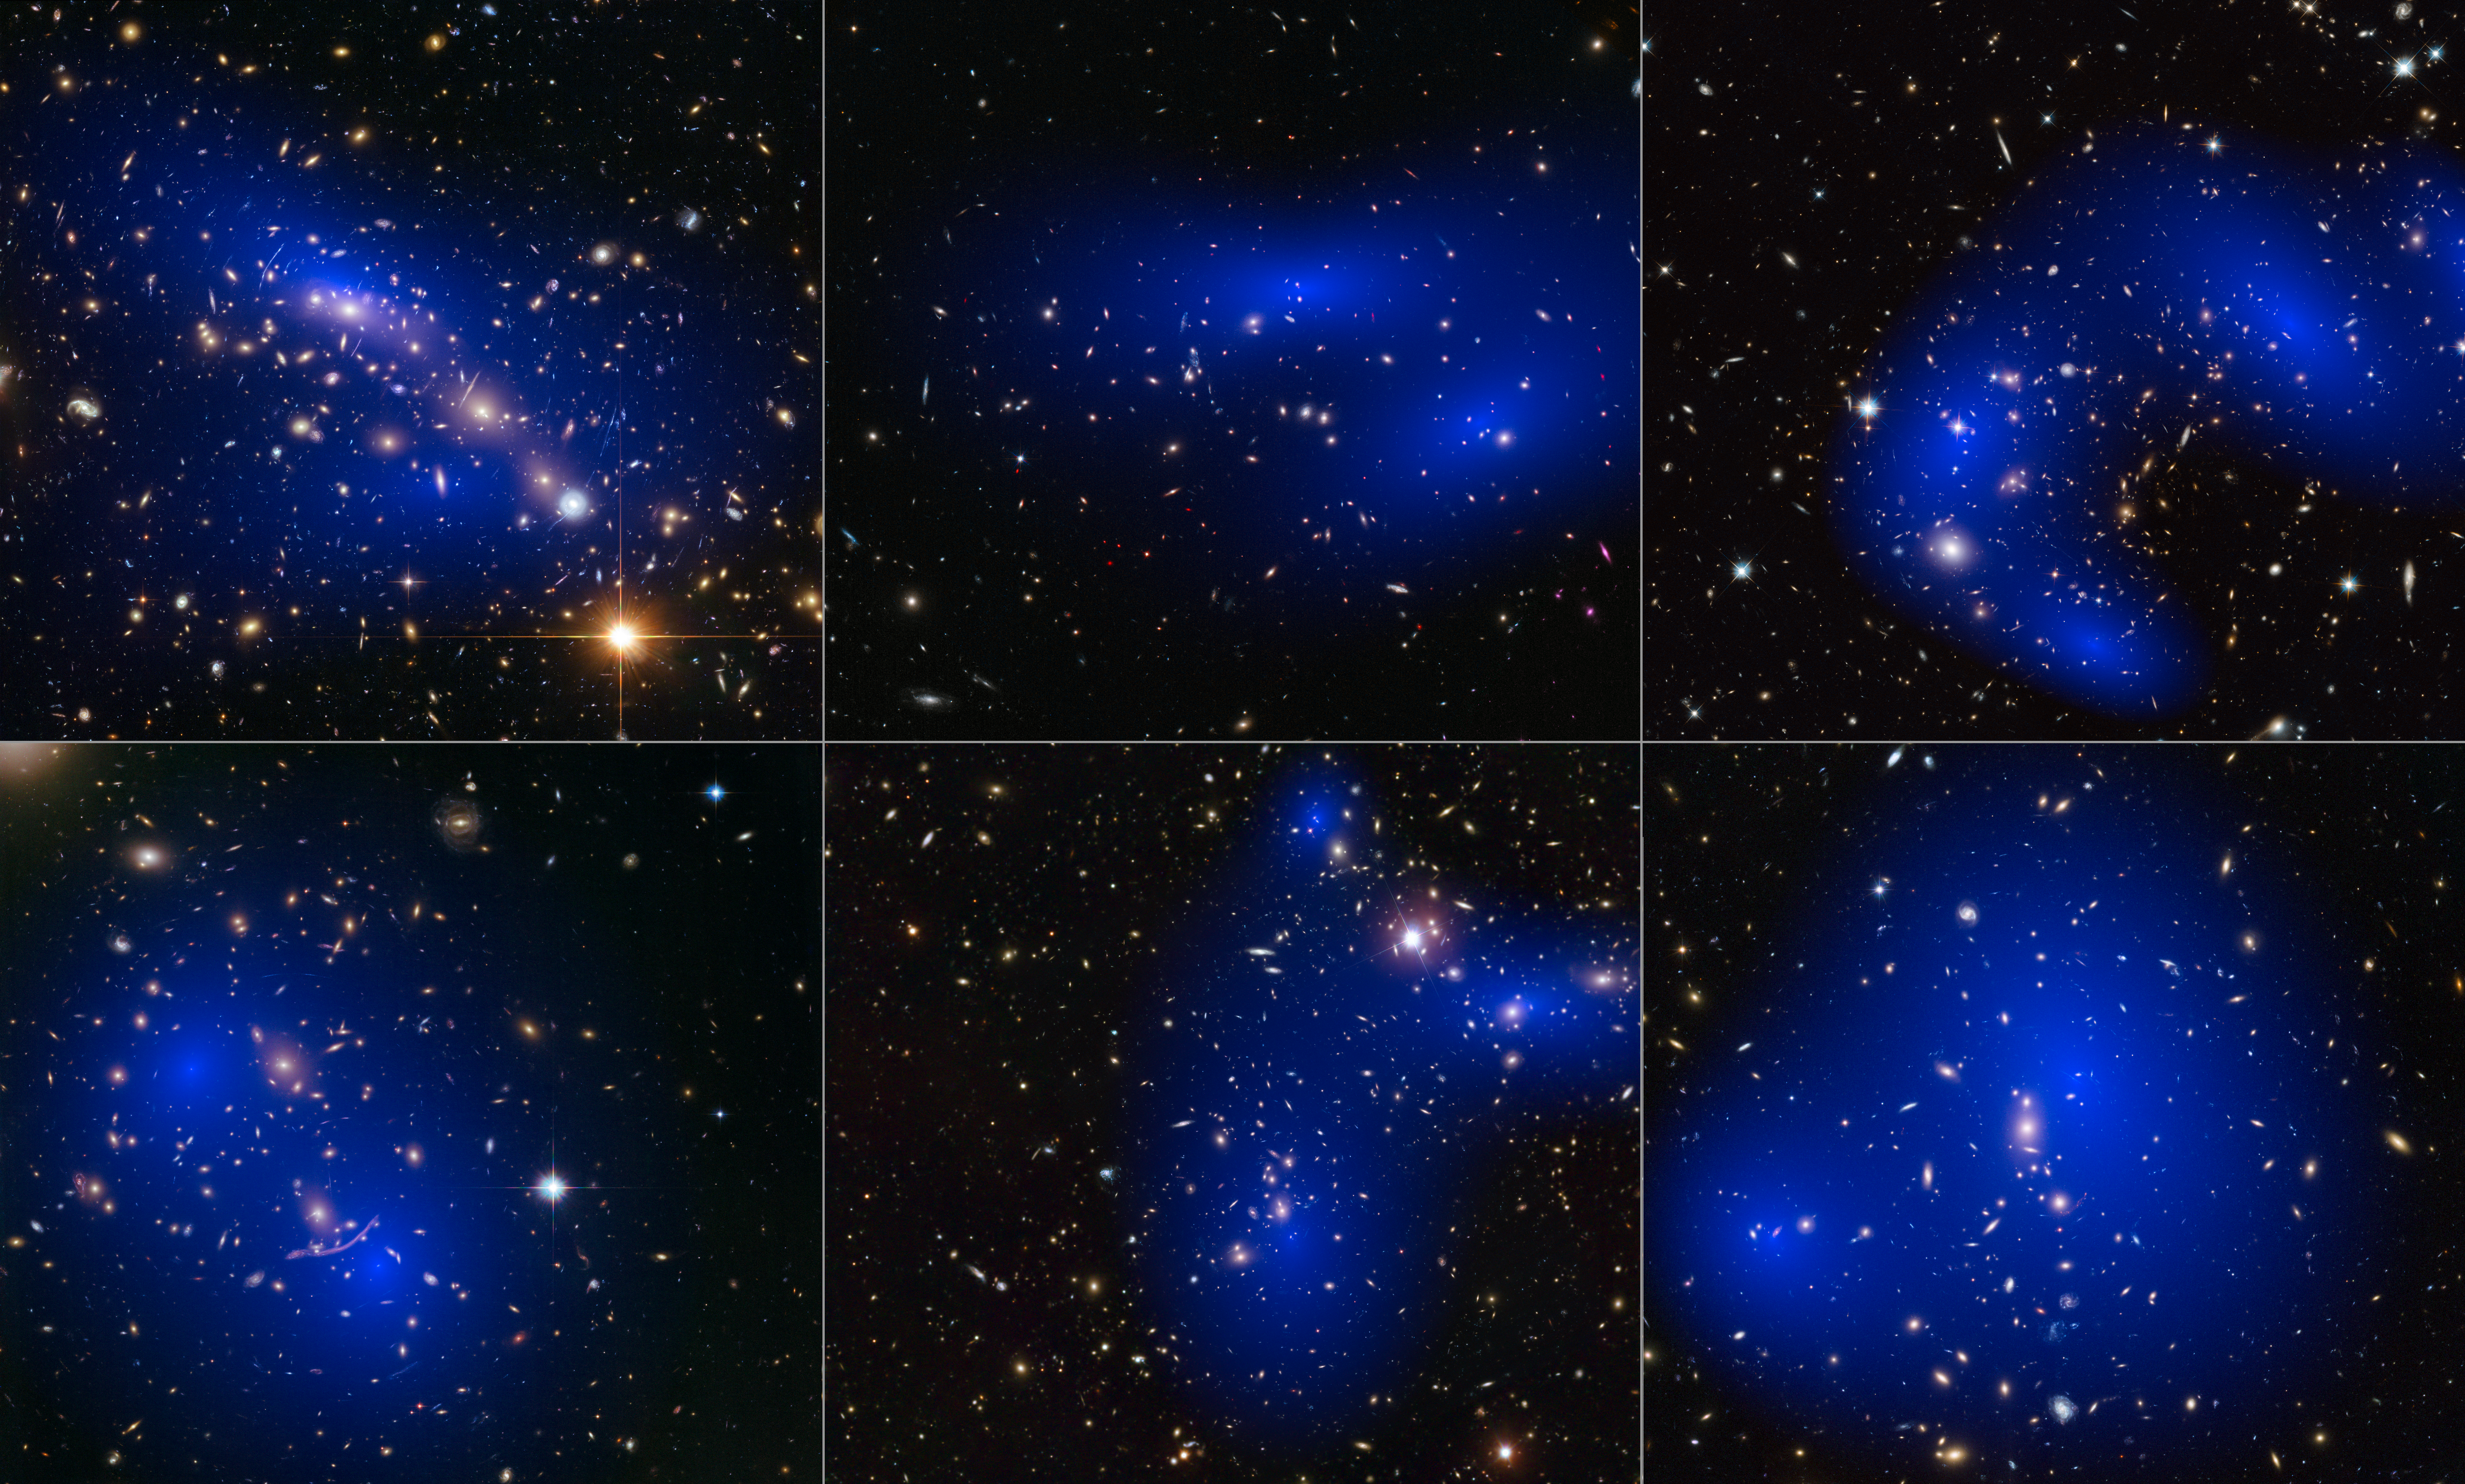

Collage of six cluster collisions with dark matter maps

This collage shows NASA/ESA Hubble Space Telescope images of six different galaxy clusters. The clusters were observed in a study of how dark matter in clusters of galaxies behaves when the clusters collide. 72 large cluster collisions were studied in total.

Using visible-light images from Hubble, the team was able to map the post-collision distribution of stars and also of the dark matter (coloured in blue).

The clusters shown here are, from left to right and top to bottom: MACS J0416.1–2403, MACS J0152.5-2852, MACS J0717.5+3745, Abell 370, Abell 2744 and ZwCl 1358+62.

Credit: NASA, ESA, D. Harvey (École Polytechnique Fédérale de Lausanne, Switzerland), R. Massey (Durham University, UK), the Hubble SM4 ERO Team, ST-ECF, ESO, D. Coe (STScI), J. Merten (Heidelberg/Bologna), HST Frontier Fields, Harald Ebeling(University of Hawaii at Manoa), Jean-Paul Kneib (LAM)and Johan Richard (Caltech, USA)